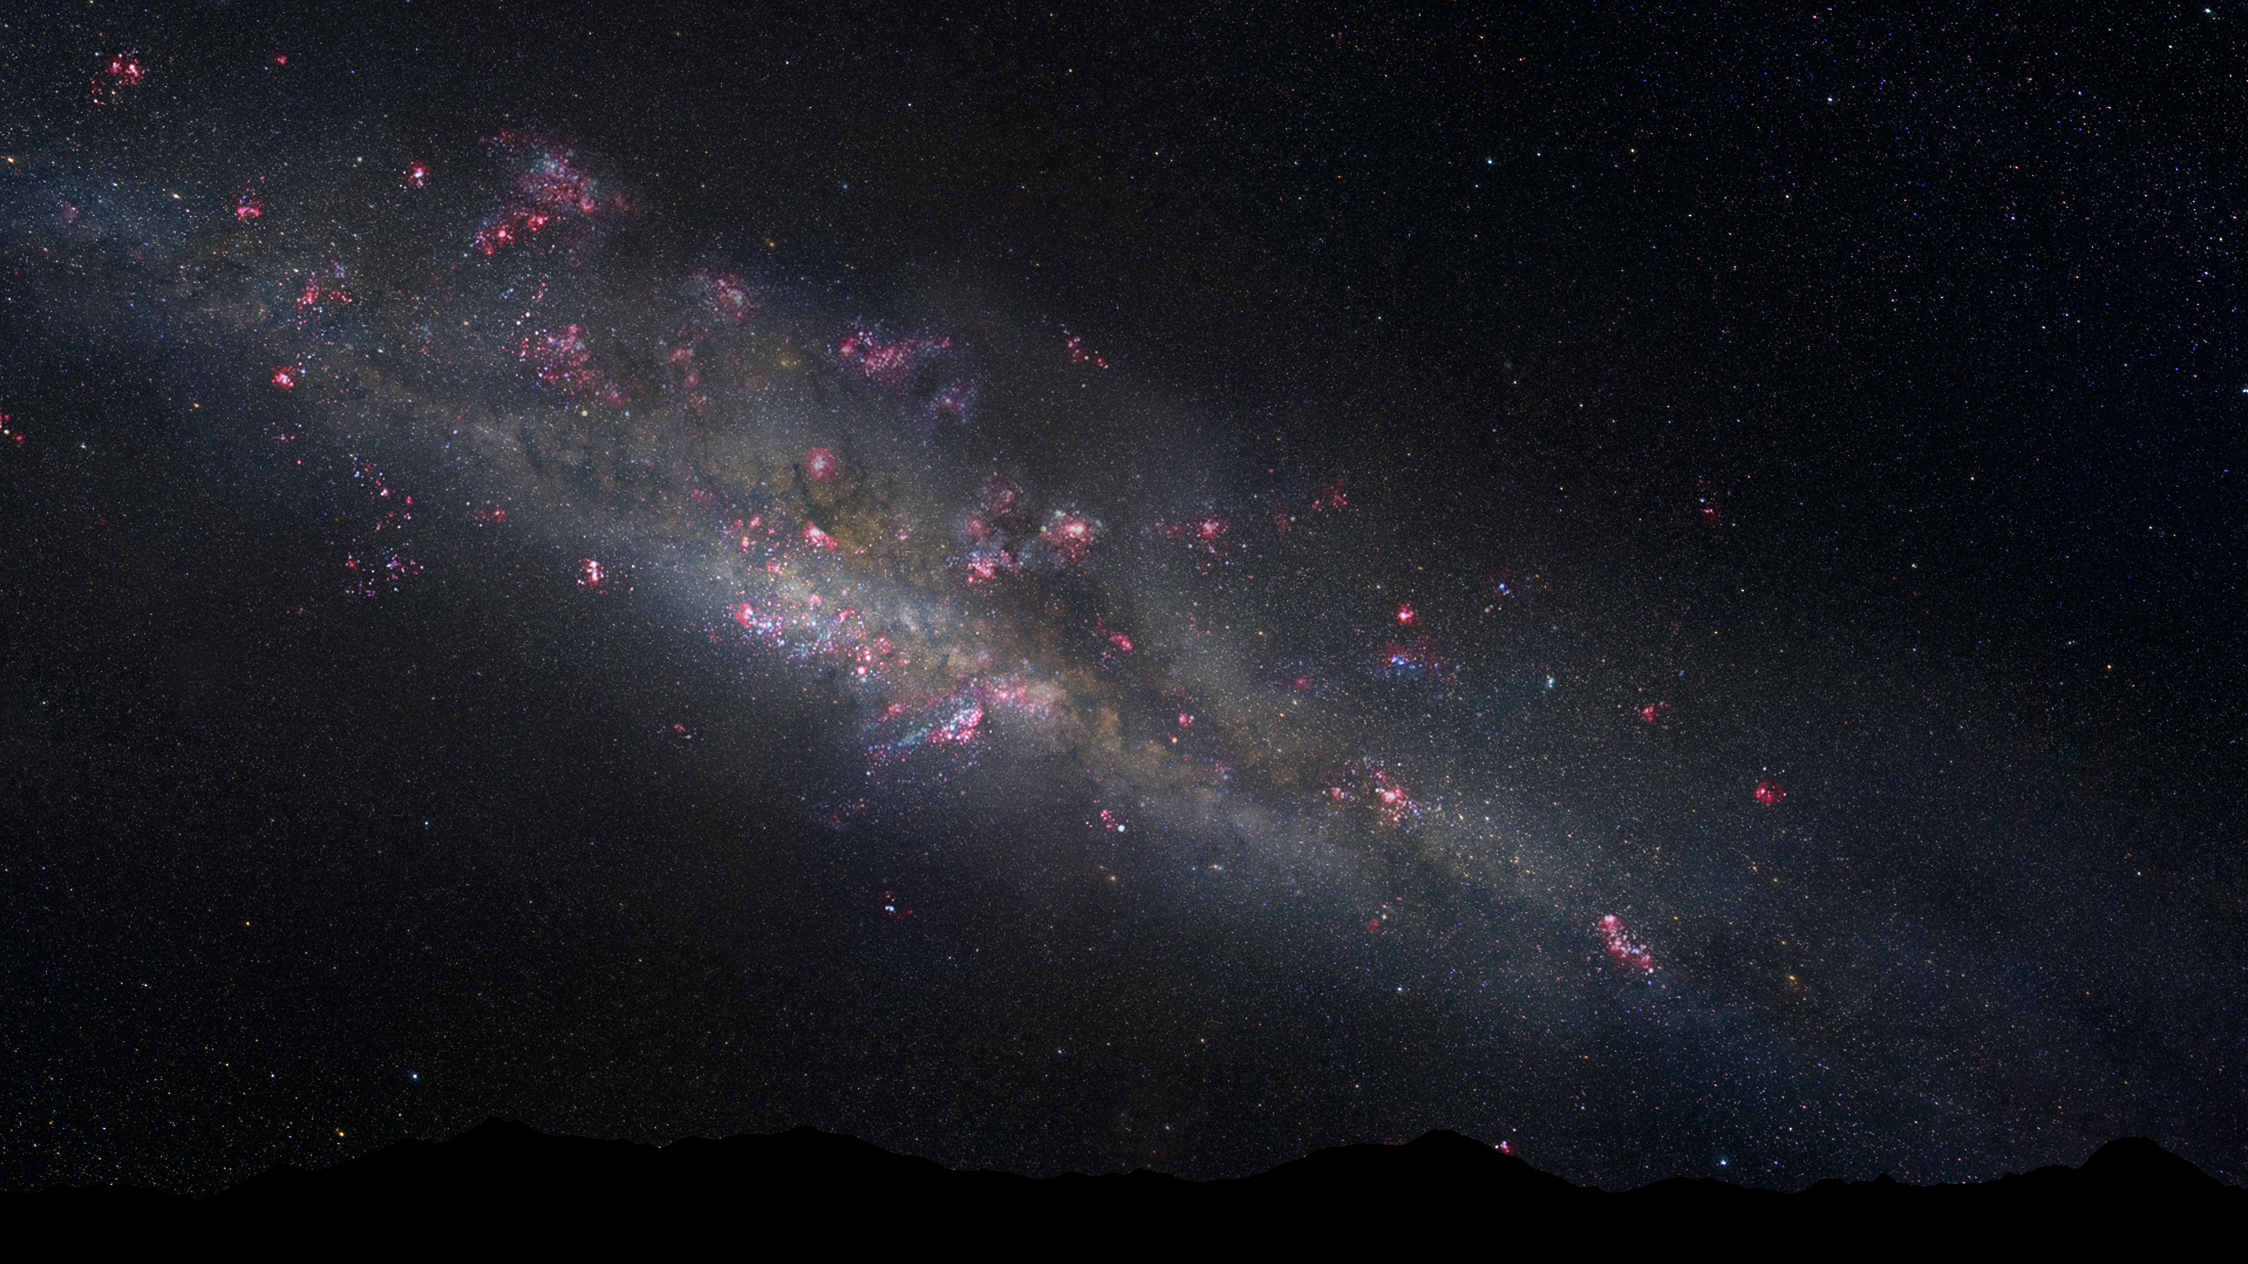

Artist's illustration of the early Milky Way

This illustration shows the Milky Way as it may have appeared 11 billion years ago. It was constructed from the all-sky image from Axel Mellinger and Robert Gendler's image of the M33 galaxy.

This imaginary view of our young Milky Way shows the galaxy as it may have appeared 11 billion years ago, as seen from the surface of a hypothetical planet. The night sky looks markedly different than the view today. The Milky Way's disc and central bulge of stars are smaller and dimmer because the galaxy is in an early phase of construction. The heavens are ablaze with a firestorm of new star formation, seen in the pinkish nebulae glowing from stars still wrapped inside their natal cocoons. The handful of stars visible in the night sky are blue and bright because they are young.

Credit: NASA, ESA, and Z. Levay (STScI/AURA)